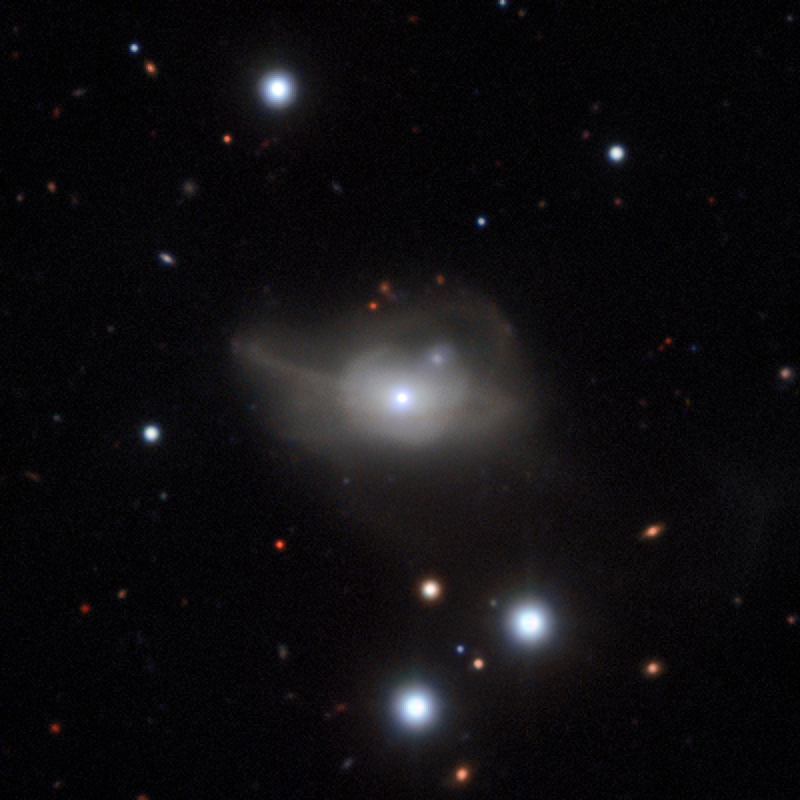

The active galaxy Markarian 1018

The mystery of a rare change in the behaviour of the supermassive black hole at the centre of the distant galaxy Markarian 1018 has been solved by an international team of astronomers using ESO’s Very Large Telescope along with the NASA/ESA Hubble Space Telescope and NASA’s Chandra X-ray Observatory.

The image was taken with the MUSE instrument on ESO’s Very Large Telescope. The faint loops of light around the galaxy are a result of its interaction and merger with another galaxy in the recent past.

Credit: ESO/CARS survey